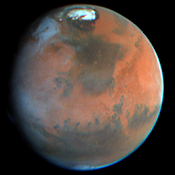

Mars Pathfinder Landing Site

Hubble Space Telescope images of Mars, taken on June 27, 1997, reveal a significant dust storm which fills much of the Valles Marineris canyon system and extends into Xanthe Terra, about 600 miles (1000 kilometers) south of the landing site.

Credit: Steve Lee (University of Colorado), Mike Wolff and Phil James (University of Toledo) and NASA/ESA